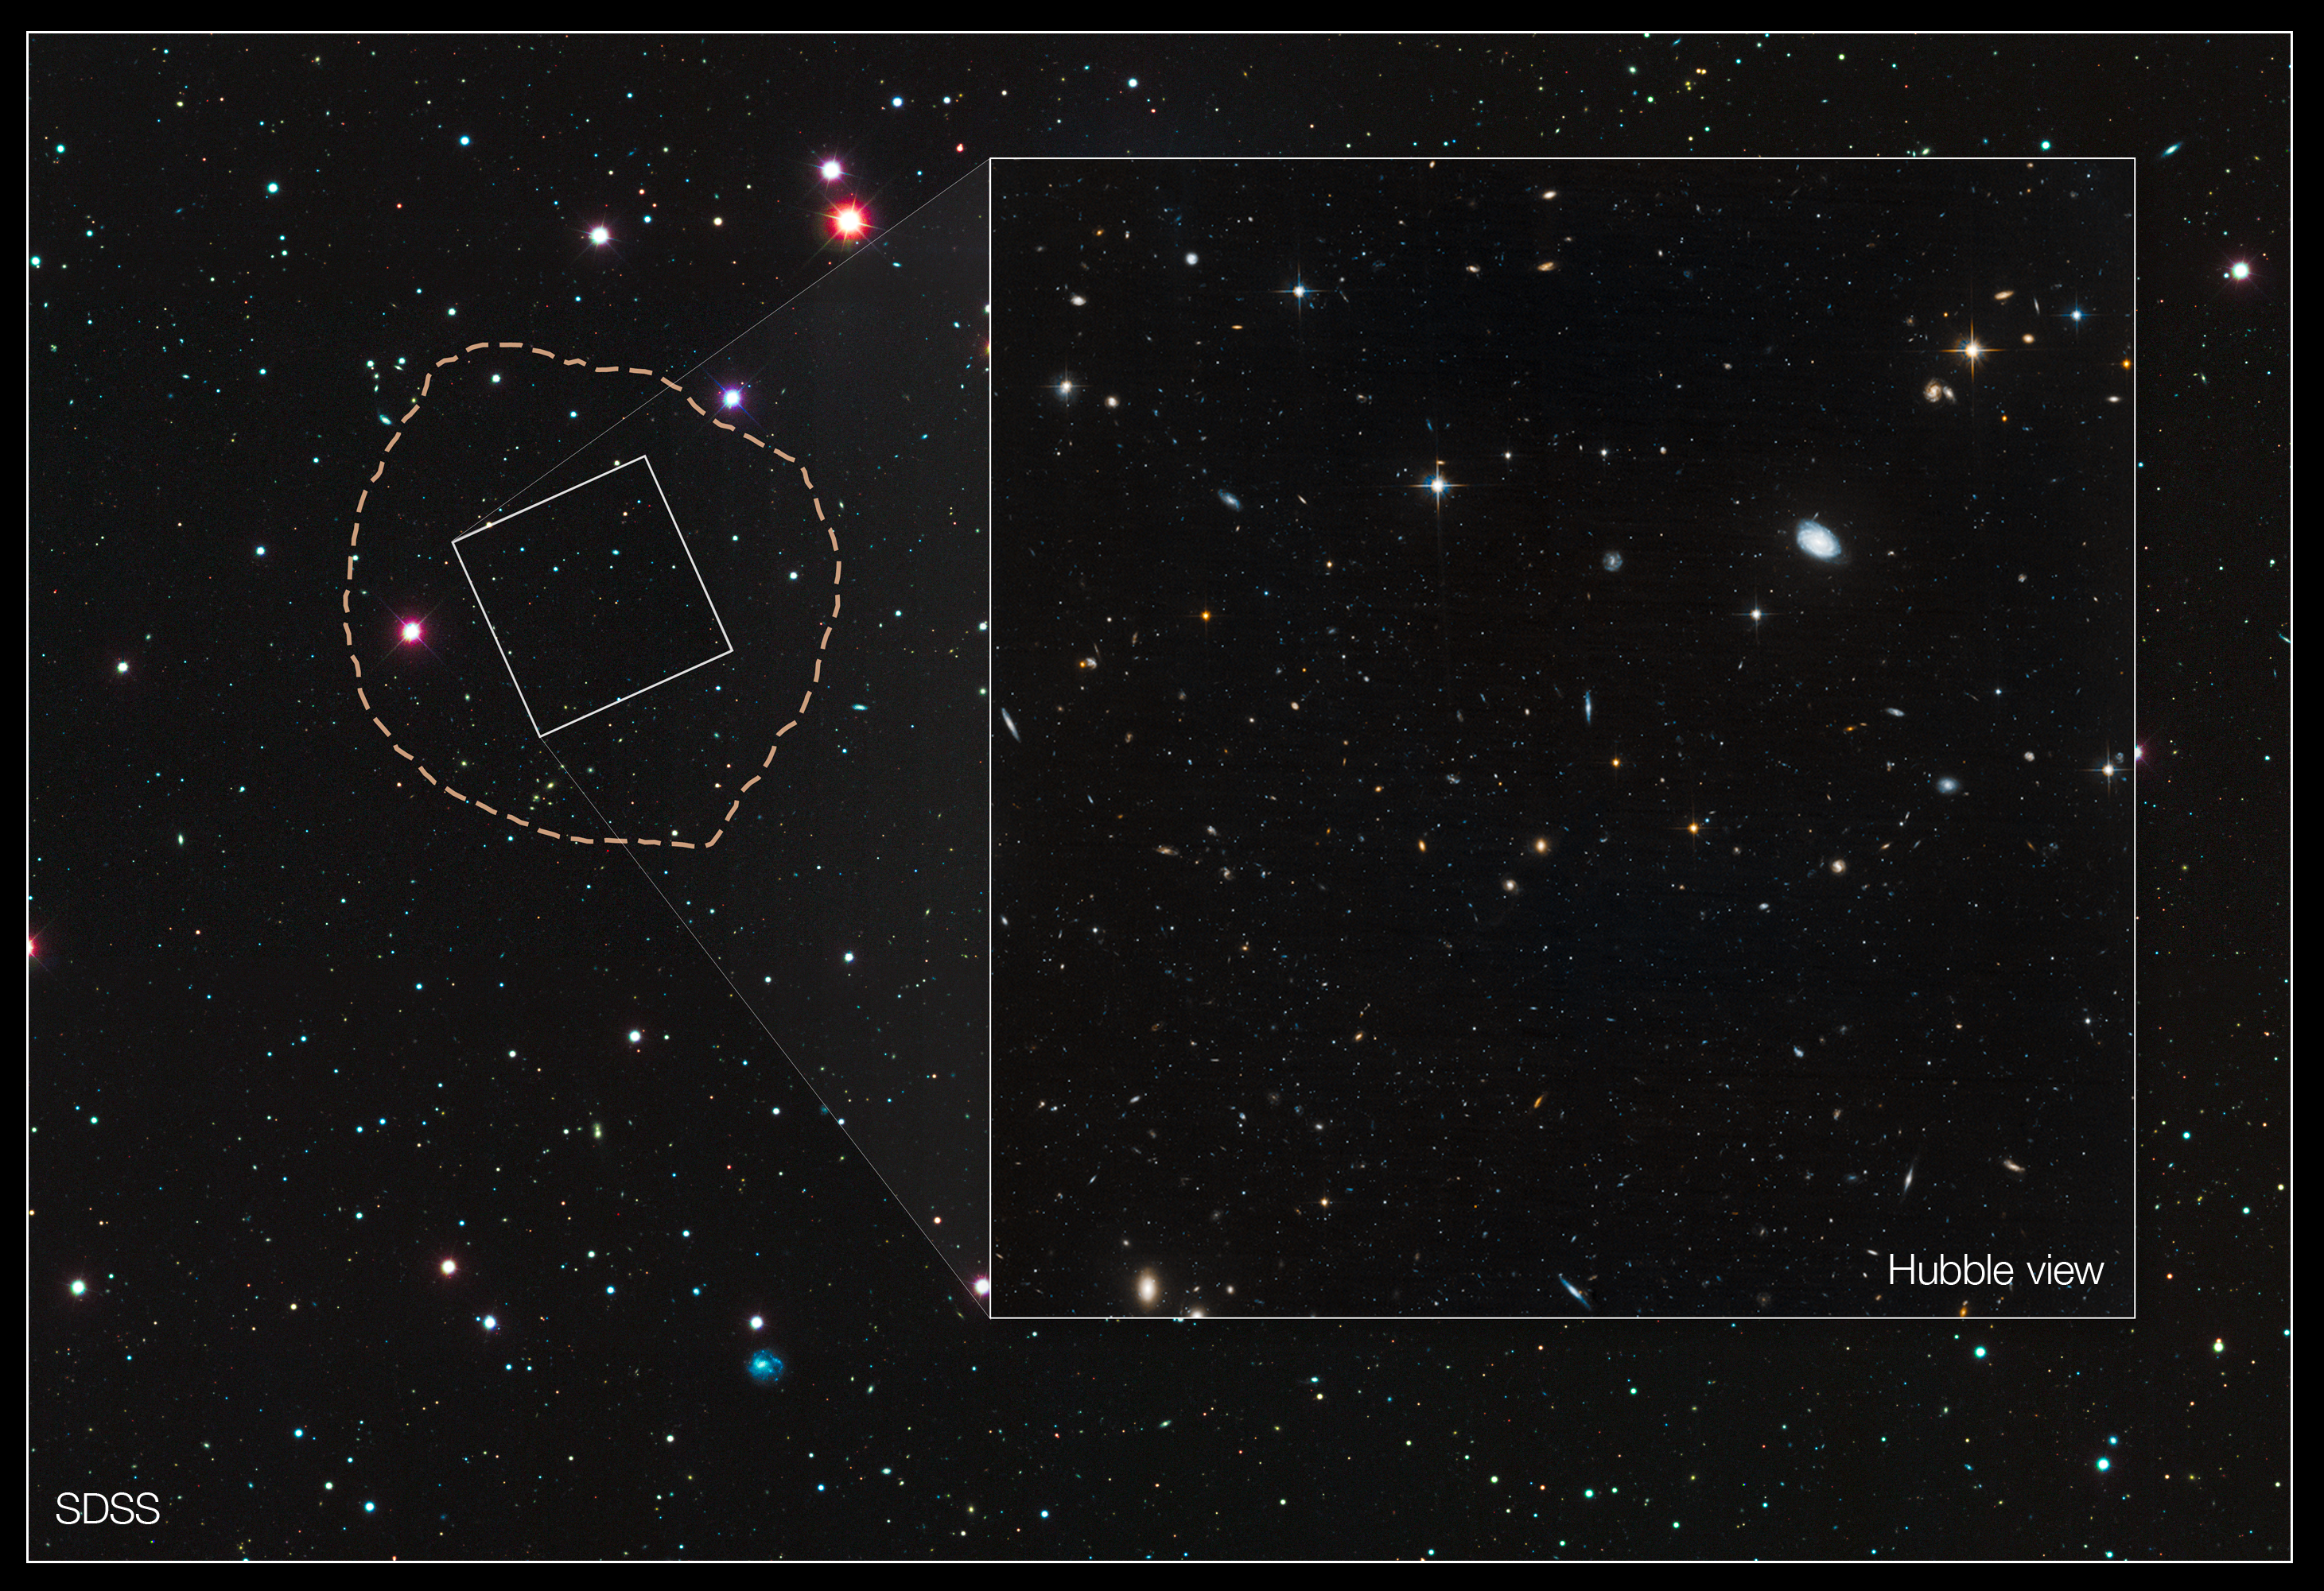

Veil lifted on ‘ghost’ galaxy

These images reveal the small and faint star-starved dwarf galaxy, Leo IV, a close neighbour of our Milky Way galaxy.

Leo IV is one of more than a dozen ultra-faint dwarf galaxies found lurking around the Milky Way. These galaxies are dominated by dark matter, an invisible substance that makes up the bulk of the universe’s mass.

The wide image, taken by the Sloan Digital Sky Survey, is a view of Leo IV and the surrounding neighbourhood. The galaxy resides 500 000 light-years from Earth. The dotted line marks the galaxy’s boundaries, measuring about 1100 light-years wide. The small white box outlines the Hubble Space Telescope’s view.

Leo IV has so few stars, roughly several thousand, that astronomers had difficulty identifying it as a galaxy. Astronomers discovered Leo IV in Sloan Digital Sky Survey images by spotting a region where a clump of stars was huddled closer together than stars in areas around it. The dwarf galaxy is composed of Sun-like stars, fainter, red dwarf stars, and some red giant stars brighter than the Sun.

Hubble’s close-up view is shown in the inset at right, measuring 483 light-years wide. Astronomers used Hubble to measure the ages of the stars in Leo IV and two other ultra-faint dwarf galaxies.

The measurements revealed that the stars in all three galaxies are more than 13 billion years old, almost as old as the 13.7-billion-year-old universe. Because the stars in these galaxies are so ancient and share the same age, astronomers suggest that a global event, such as reionisation, shut down star formation in them.

Reionisation is a transitional phase in the early universe when the first stars burned off a fog of cold hydrogen.

The Hubble image is a composite of exposures taken in January 2012 by the Advanced Camera for Surveys.

Credit: NASA, ESA, and T. Brown (STScI)